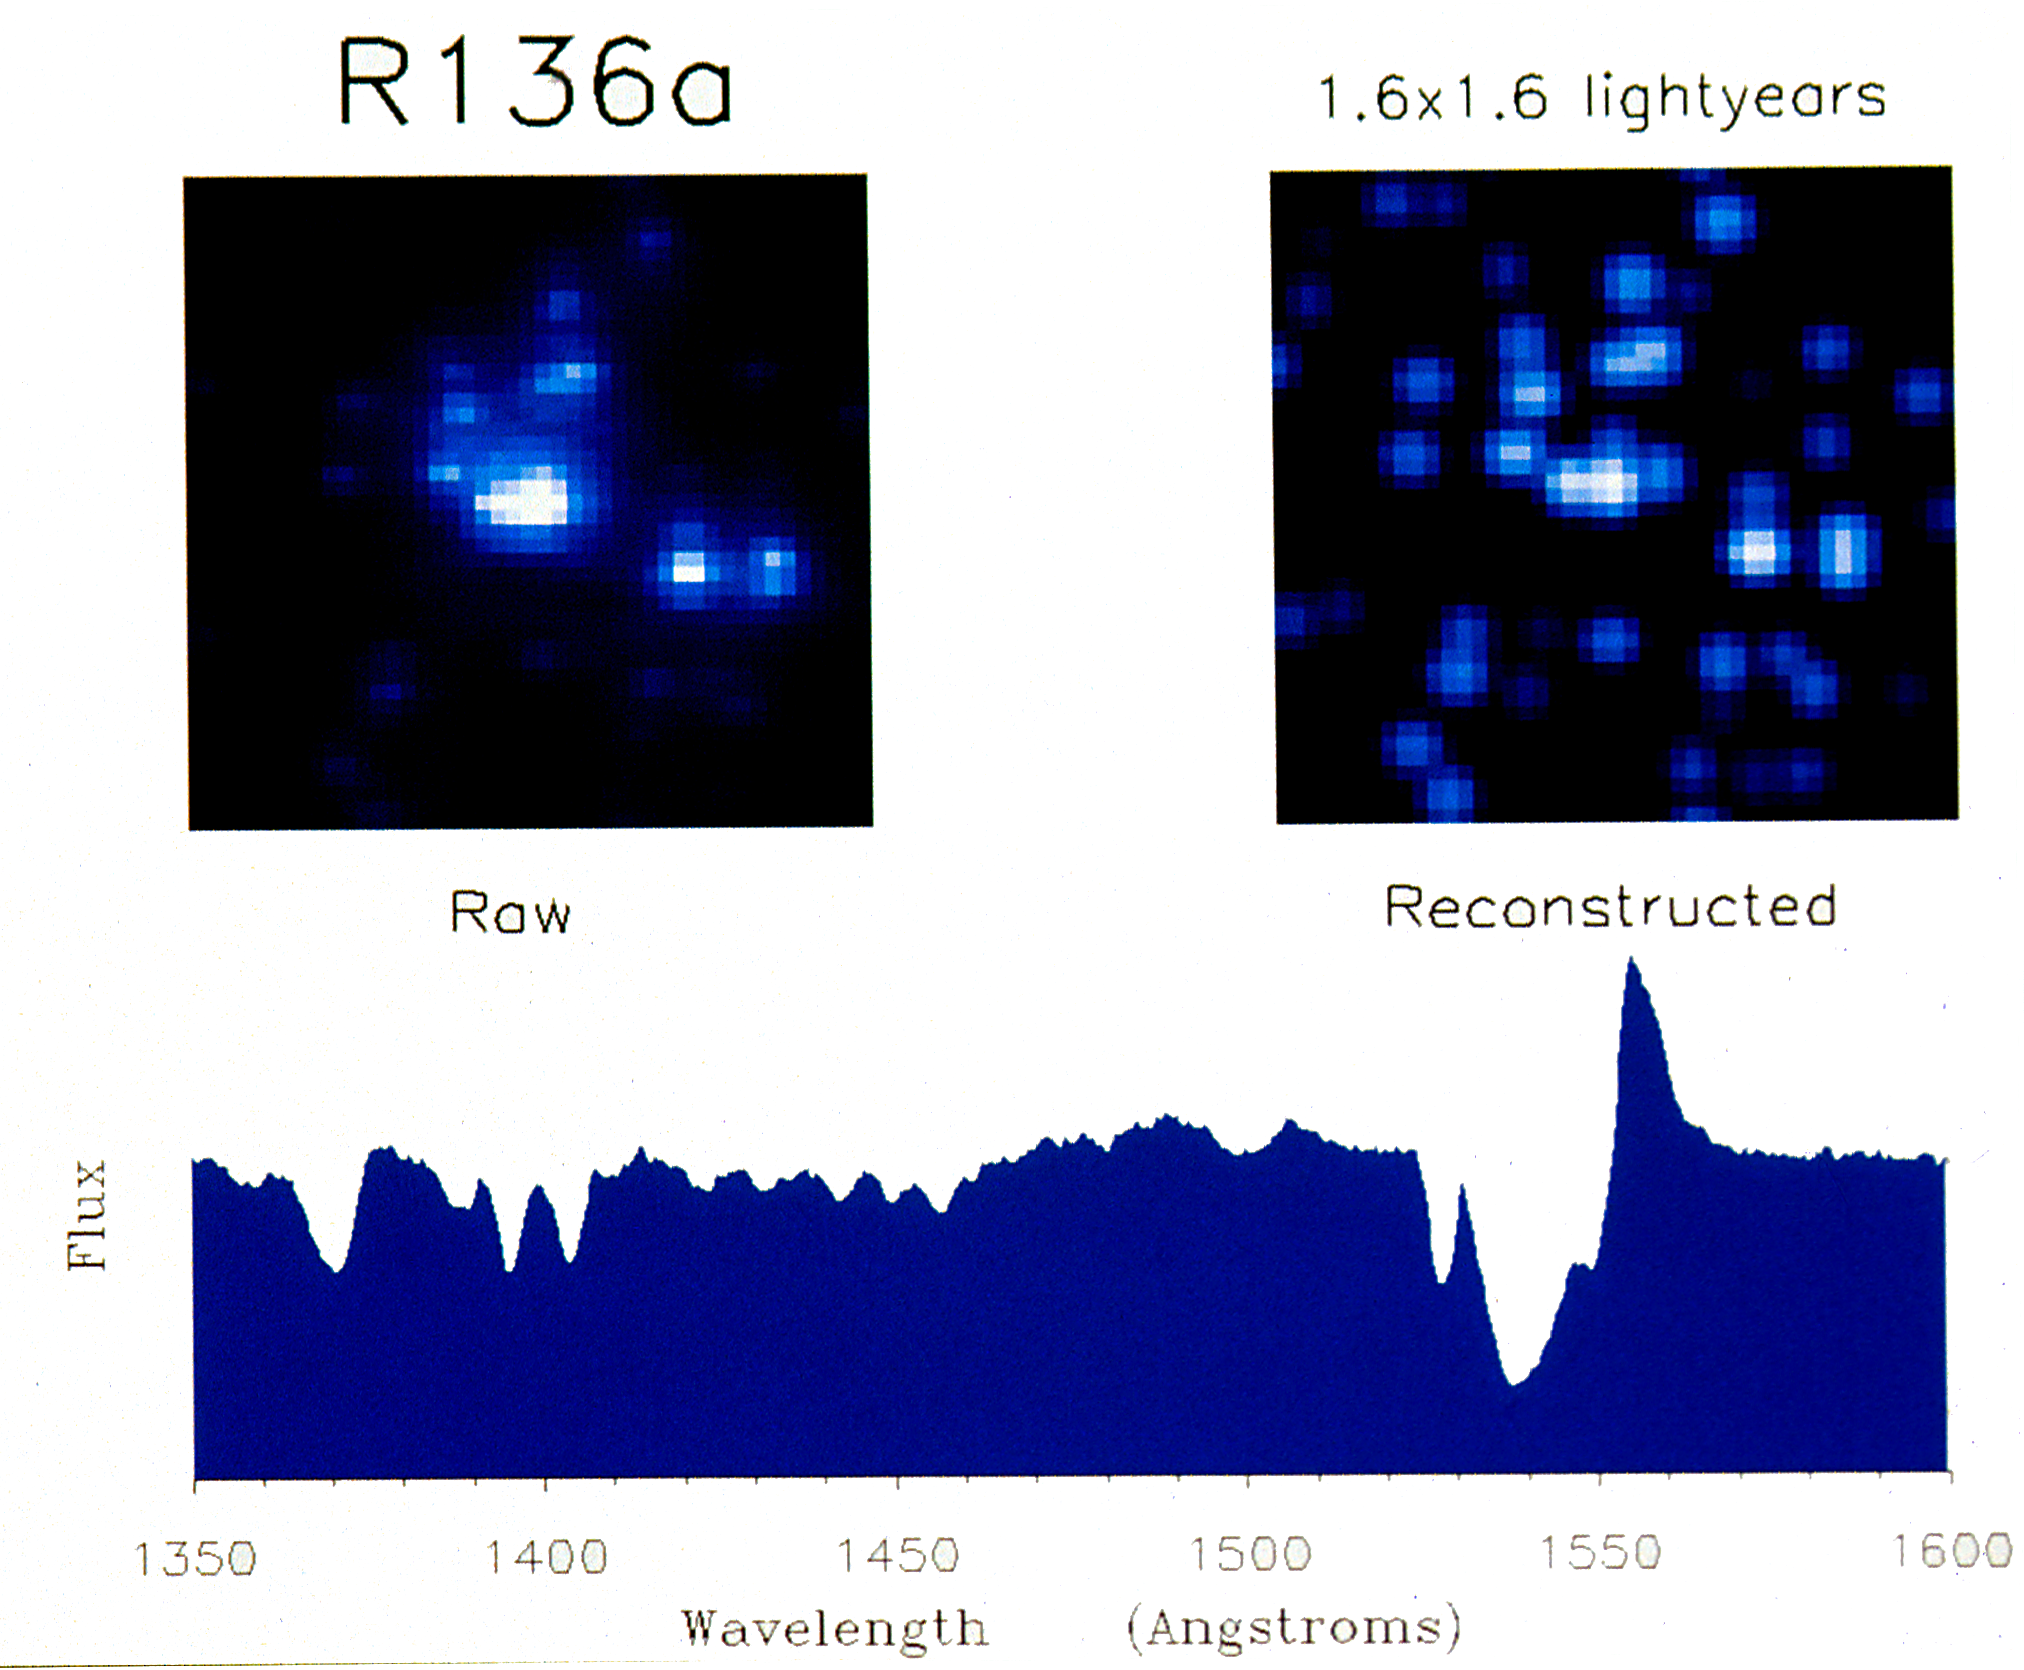

Clearest view yet of massive star cluster

A new image processing technique has yielded the clearest view yet of an extraordinary star cluster located about 169,000 light years from Earth. The new technique, called photometric reconstruction, was applied to a photograph of the star cluster Rl36 that was obtained with the Planetary Camera onboard the NASA/ESA Hubble Space Telescope. It reveals that there are at least 47 stars located within an area 1.6 light years across in Rl36. (One light year is approximately 5.8 trillion miles long.) In contrast, the Sun is about 4 light years from the nearest known star, Proxima Centauri.

"Our reconstructed photo of R136 shows what the raw Hubble photos will look like after the 1993 repair mission to fix the telescope's spherical aberration," says Goddard astronomer, Dr. Sally Heap.

Credit: NASA/ESA/Goddard Space Flight Center